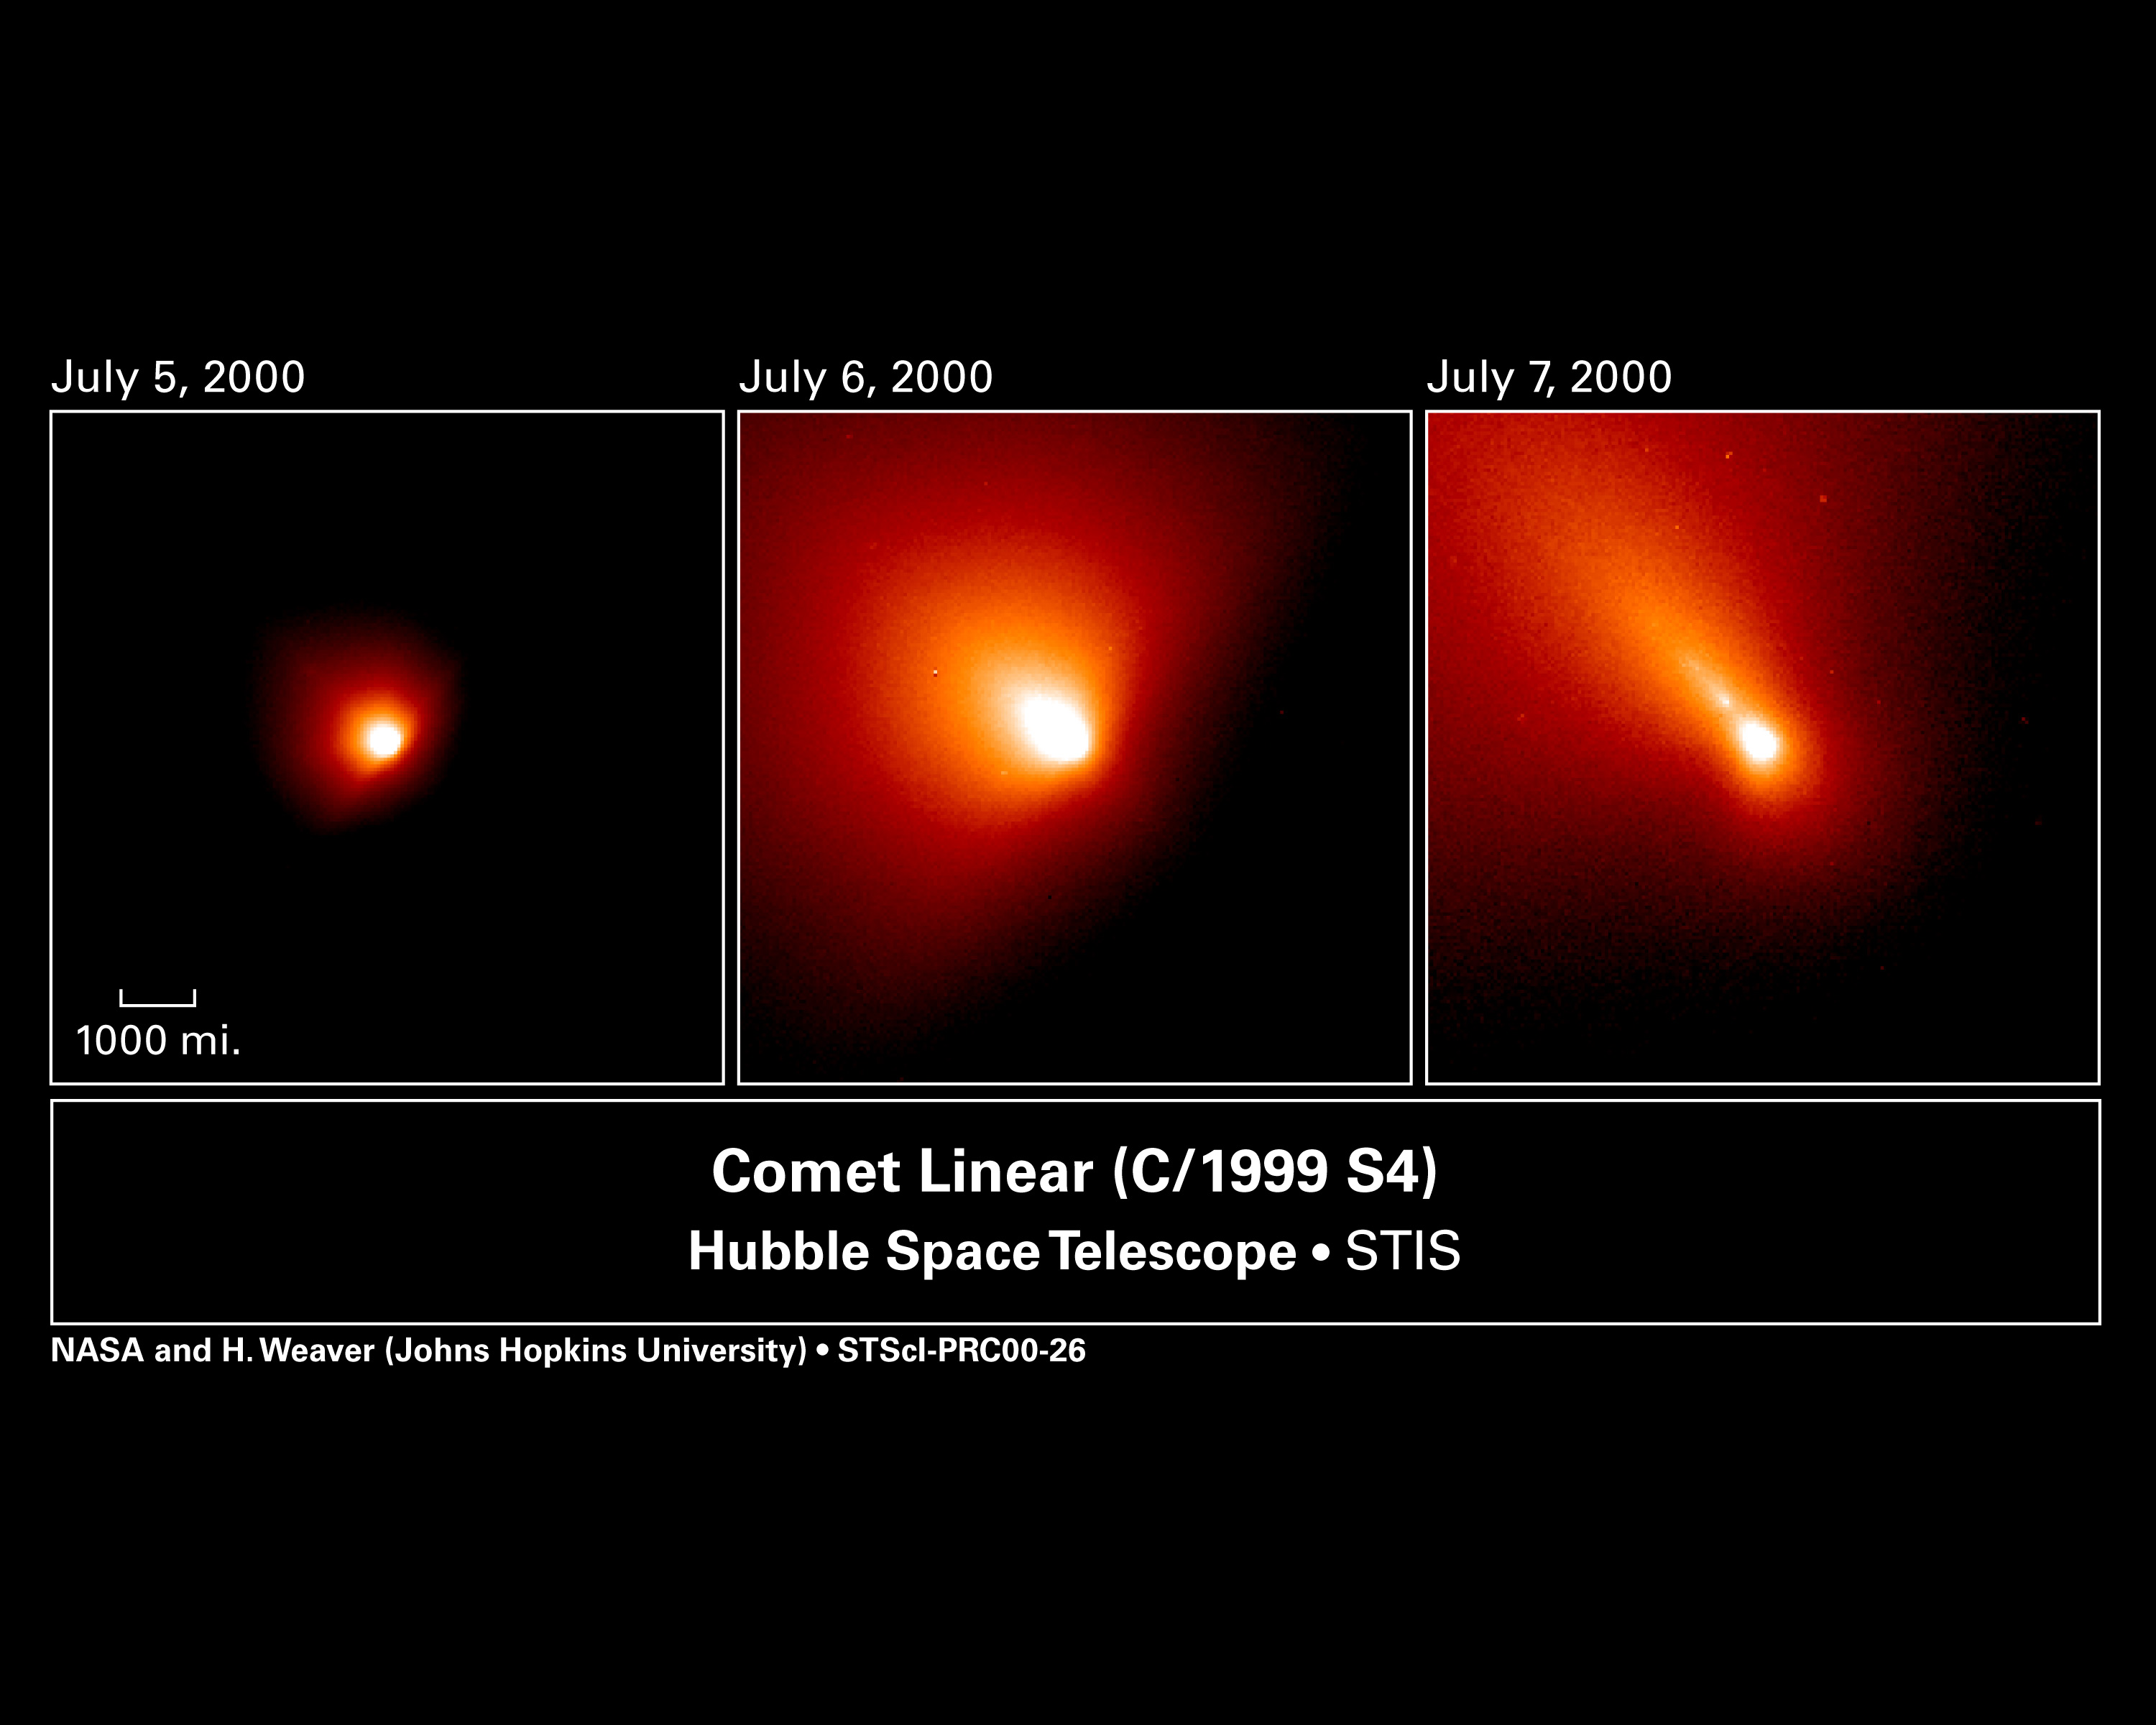

Comet Linear

These three photographs taken with the Hubble Space Telescope chronicle a violent outburst in the life of comet LINEAR, also known as C/1999 S4. The orbiting observatory's Space Telescope Imaging Spectrograph tracked the streaking comet for two days, July 5 to 7, capturing a dramatic leap in its brightness [left image]; followed by seeing a wave of newly created dust from the outburst flowing into the coma, a shell of dust surrounding the core [middle image]; and culminating in the discovery of a castoff chunk of material from the nucleus sailing along its tail [the bright dot trailing behind the comet in the picture at right]. The white region represents the brightest part of the coma. The nucleus cannot be seen in these images because it is about a mile or so across, which is too small for the Hubble telescope to see.

Credit: NASA/ESA, H. Weaver and P. Feldman (Johns Hopkins University), M. A'Hearn (University of Maryland), C. Arpigny (Liège University), M. Combi (University of Michigan), M. Festou (Observatoire Midi-Pyrénées), and G.-P. Tozzi (Arcetri Observatory)